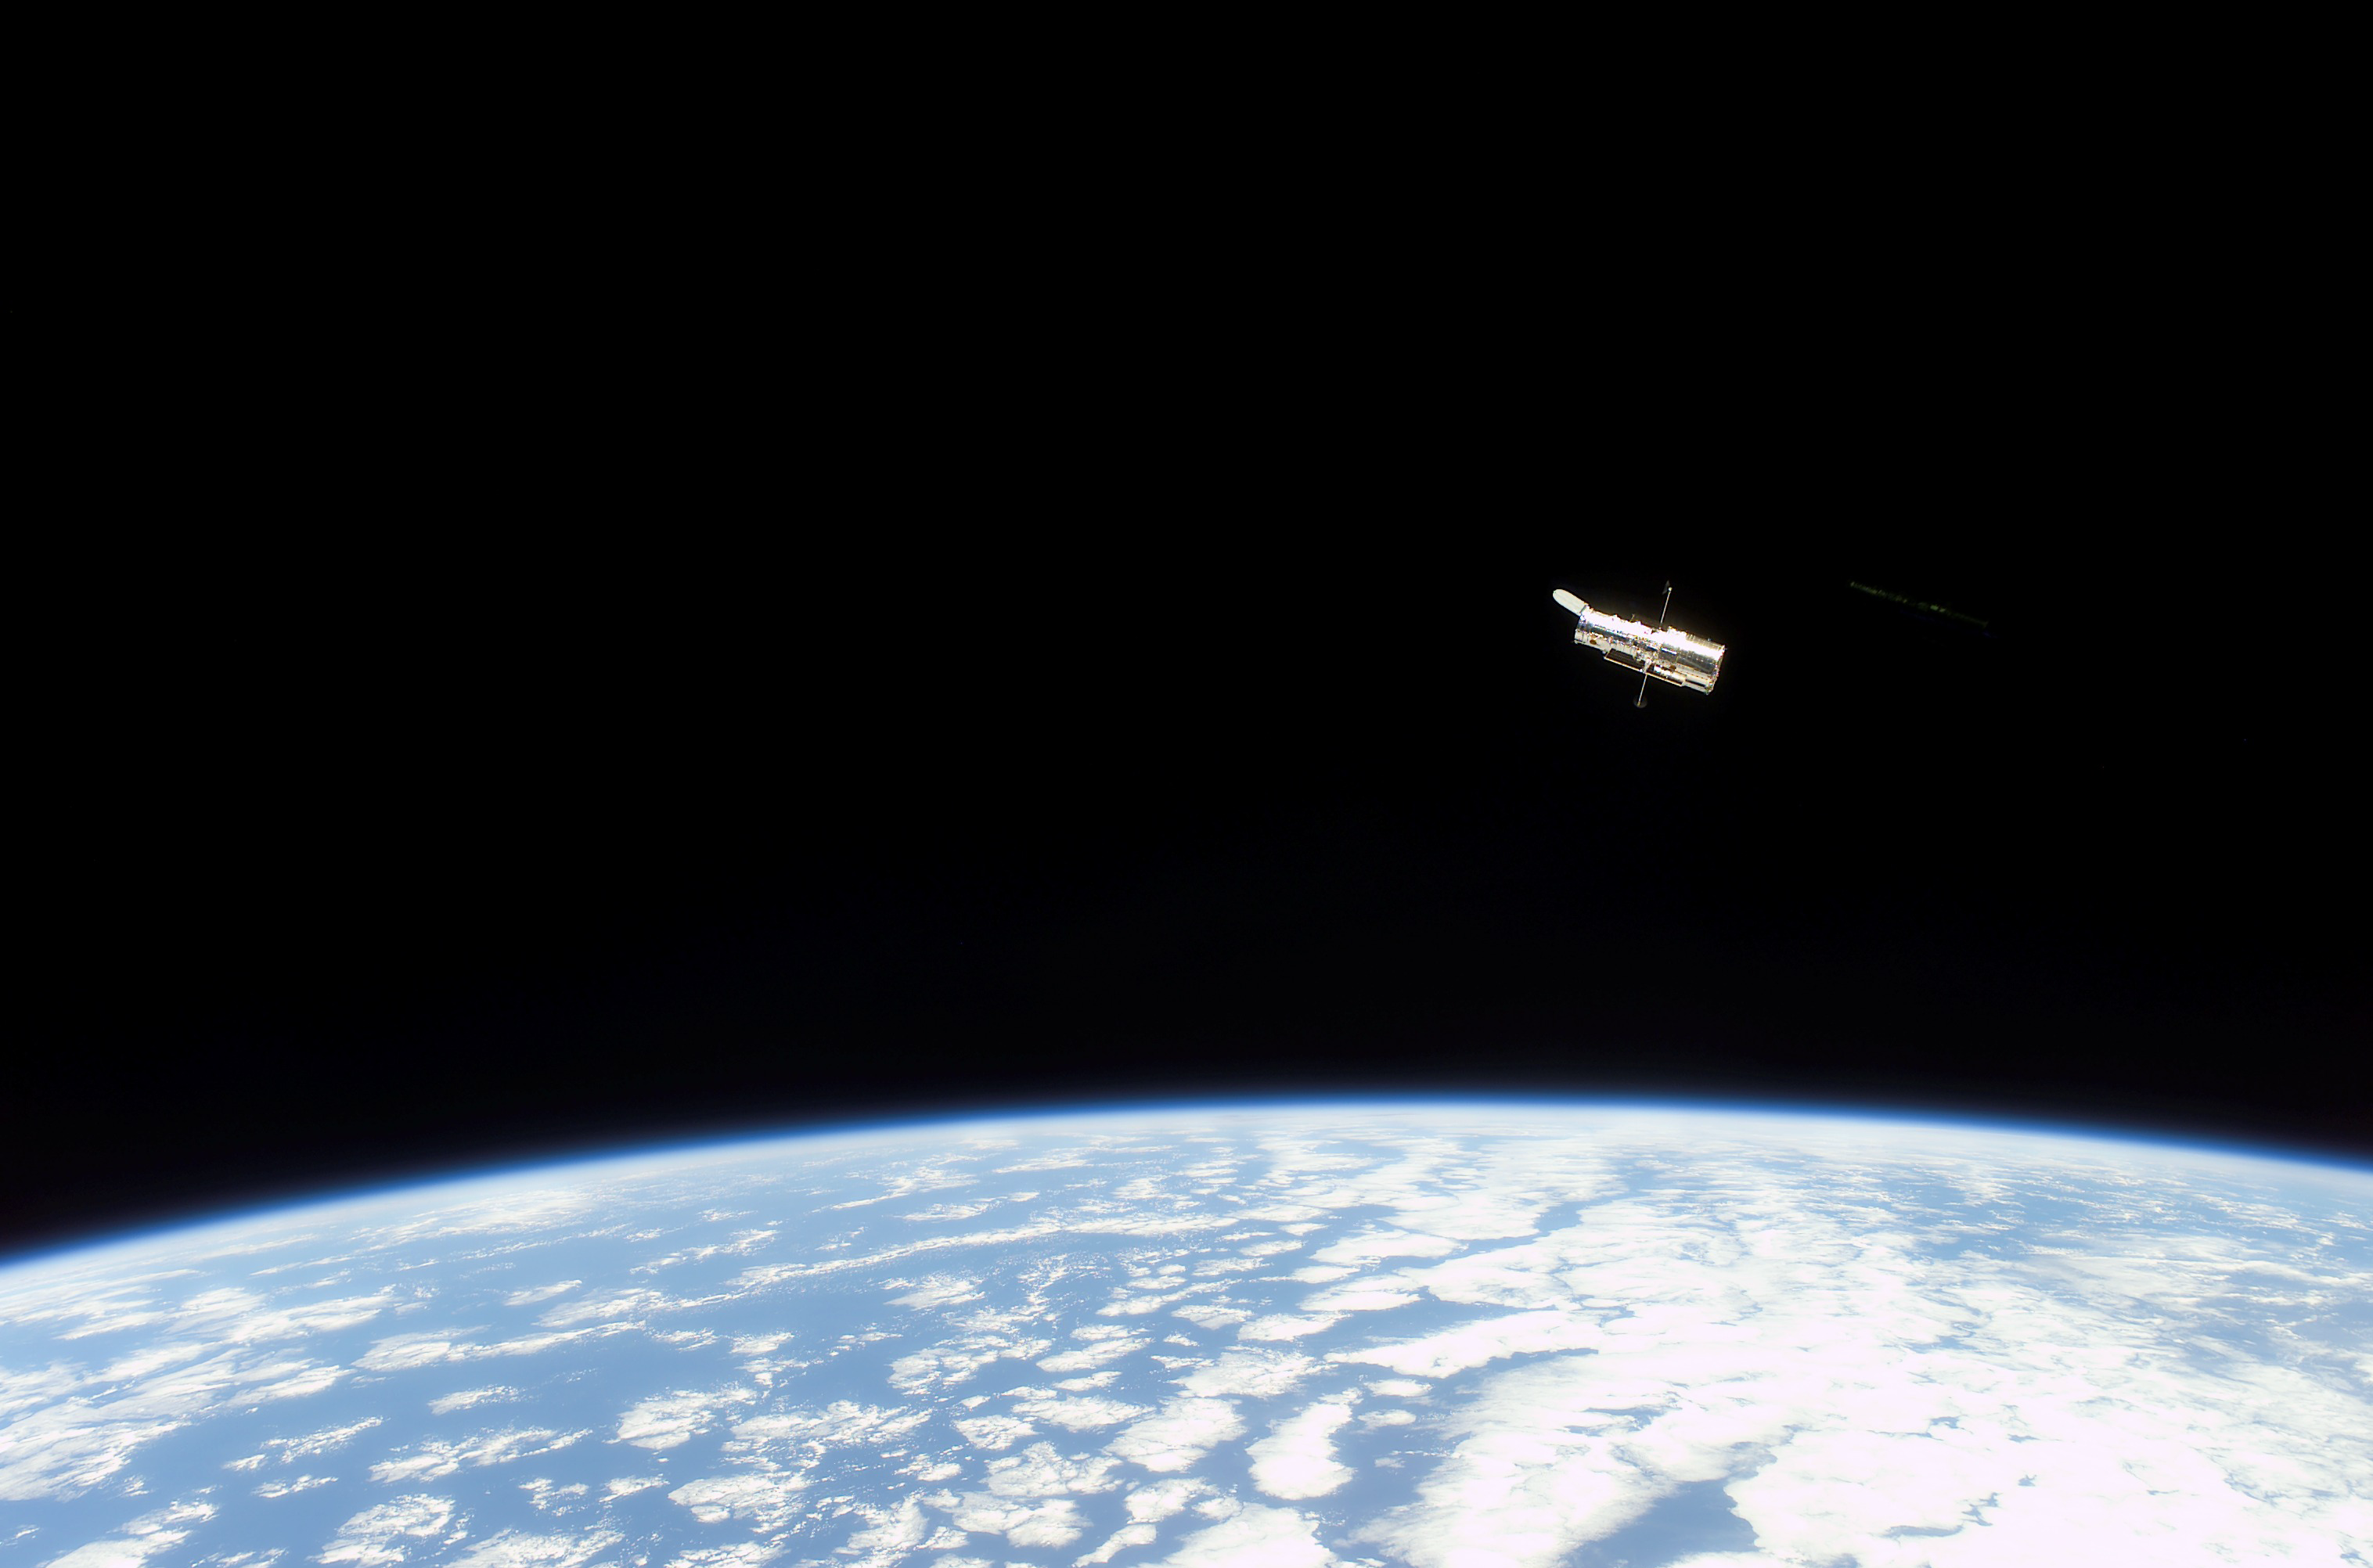

Hubble Space Telescope sporting new solar arrays during SM3B

The NASA/ESA Hubble Space Telescope, sporting new solar arrays and other important but less visible new hardware, begins its separation from the Space Shuttle Columbia. The STS-109 crew deployed the giant telescope at 4:04 a.m. CST (10:04 GMT), 9 March 2002. Afterward, the seven crew members began to focus their attention to the trip home, scheduled for 12 March. The STS-109 astronauts conducted five space walks to service and upgrade Hubble. This image was recorded with a digital still camera.

Credit: NASA/ESA